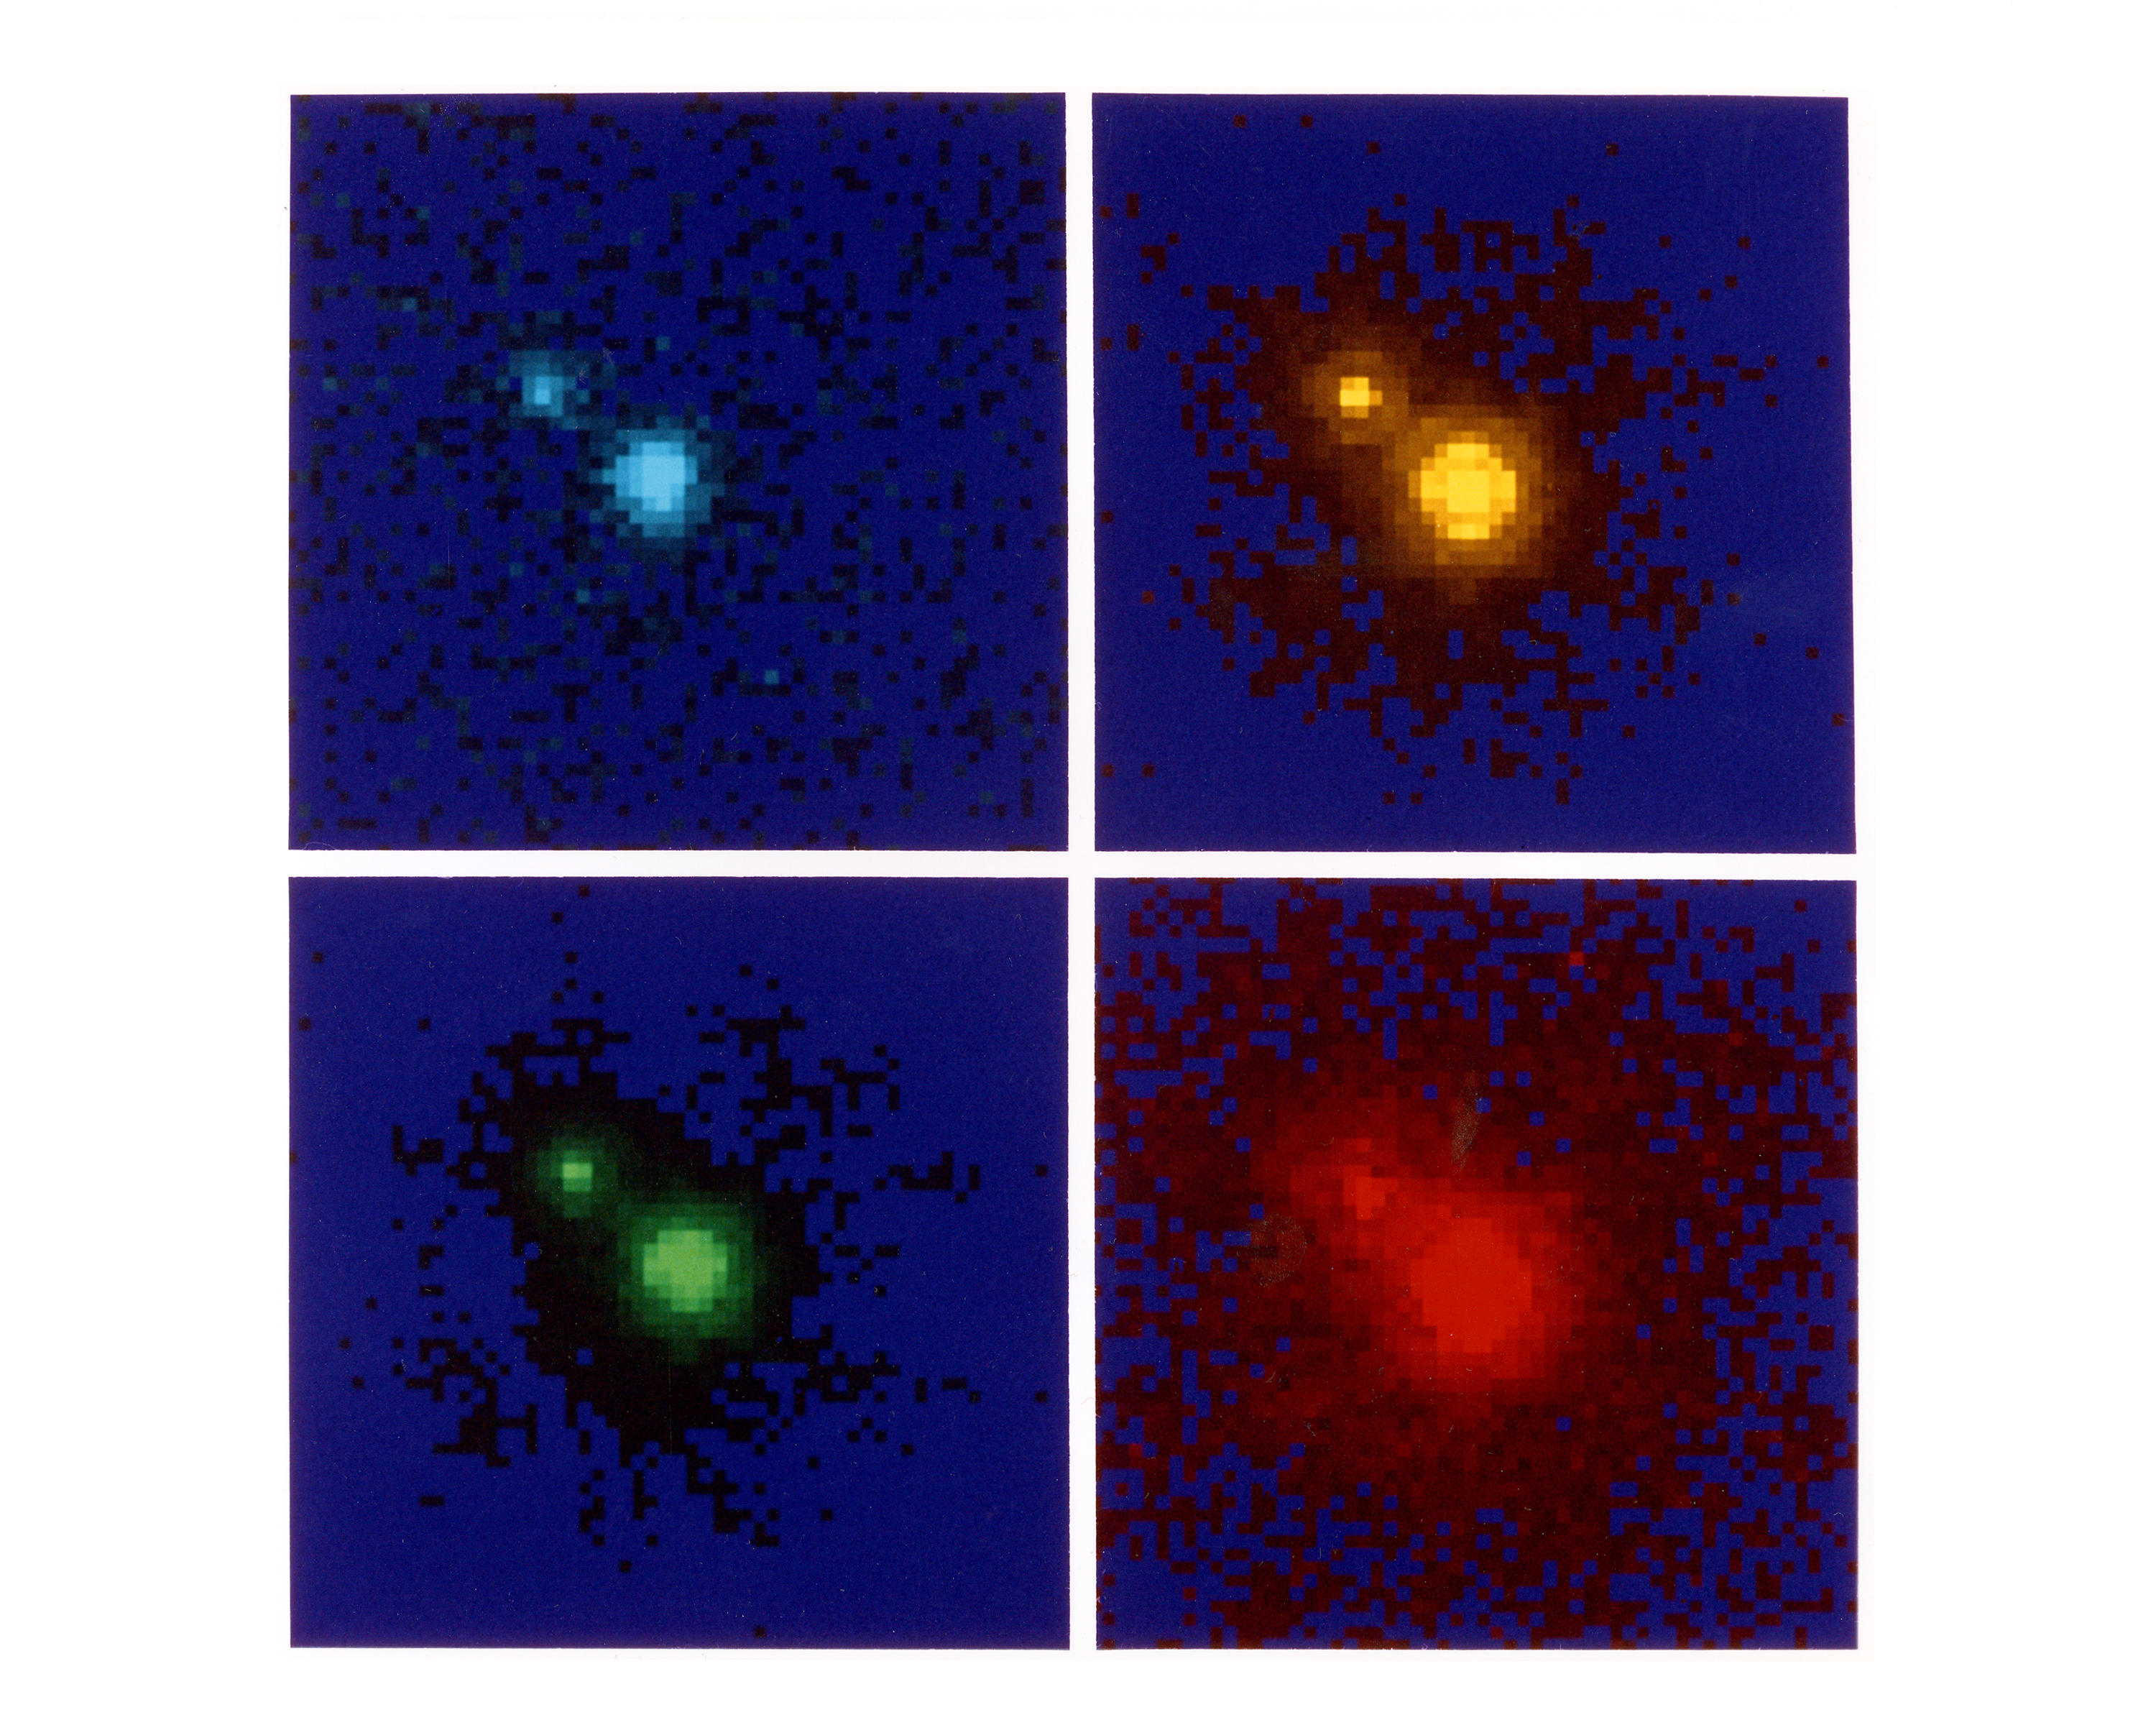

NASA/ESA Hubble Space Telescope colour images of gravitational lenses

NASA/ESA Hubble Space Telescope (HST) colour views of the distant quasar 1208+101 indicate that its image has been split in two by a gravitational lensing. The quasar was first observed with HST's Wide Field/Planetary Camera in July 1991 as part of the Snapshot Survey for gravitational lenses. The Snapshot Survey consists of short (about four minute) exposures of several hundred very bright, very distant quasars with the Wide Field/Planetary Camera. Current theories of gravitational lensing suggest that several of these quasars should be seen as multiple images with separations smaller than can be seen in ground-based observations.

Gravitational lensing is a phenomenon by which the pull of a massive object, such as a galaxy, can bend light from another, more distant, object as the light passes near or through it, focusing the light in multiple identical images. The high spatial resolution capability of HST allows searches for multiple images at separations of only 0.2 arc seconds; this is about five times smaller than can be done with ground-based instrumentation.

Credit: Professor John Bahcall, Dr. Donald Schneider, Dr. Dan Mayoz, all of the Institute for Advanced Study